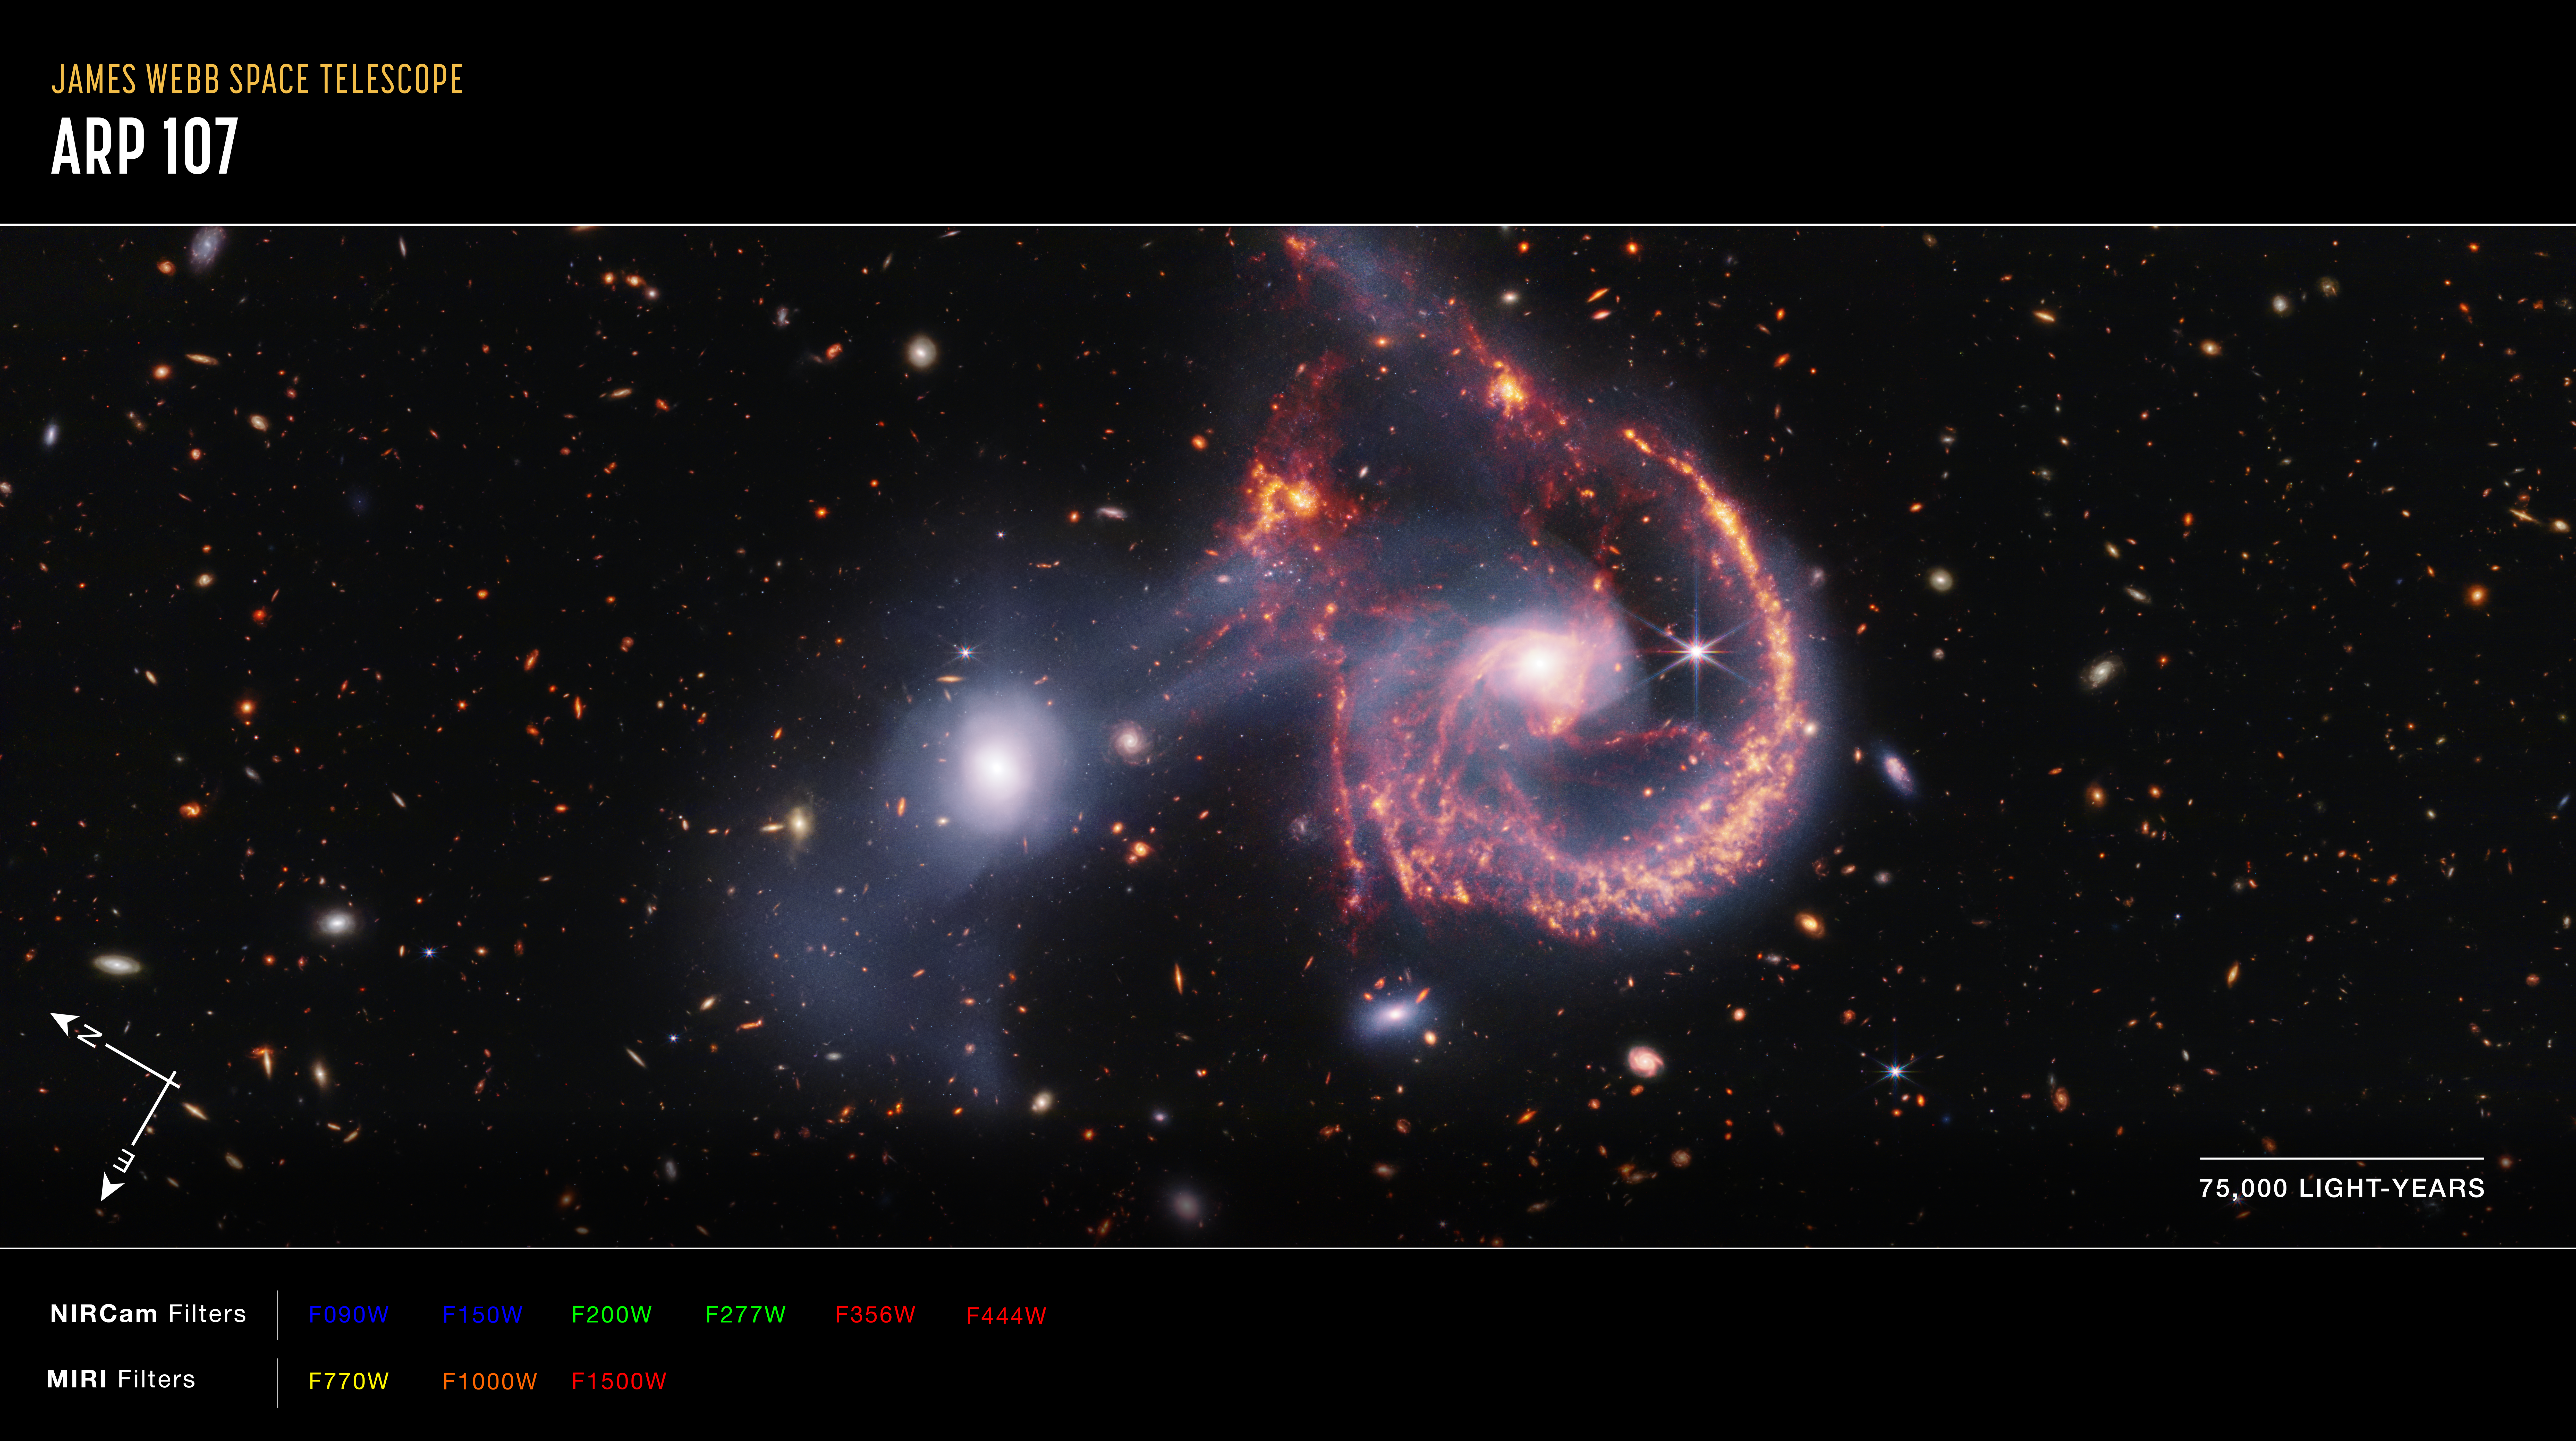

Arp 107 compass image

The north and east compass arrows show the orientation of the image on the sky. Note that the relationship between north and east on the sky (as seen from below) is flipped relative to the direction arrows on a map of the ground (as seen from above).

The scale bar is labelled in light-years, which is the distance that light travels in one Earth-year. (It takes 75 000 years for light to travel a distance equal to the length of the bar.) One light-year is equal to about 5.88 trillion miles or 9.46 trillion kilometres. The field of view shown in this image is approximately 450 000 light-years across.

This image shows invisible near-infrared and mid-infrared wavelengths of light that have been translated into visible-light colours. The colour key shows which NIRCam and MIRI filters were used when collecting the light. The colour of each filter name is the visible light colour used to represent the infrared light that passes through that filter.

Credit: NASA, ESA, CSA, STScI